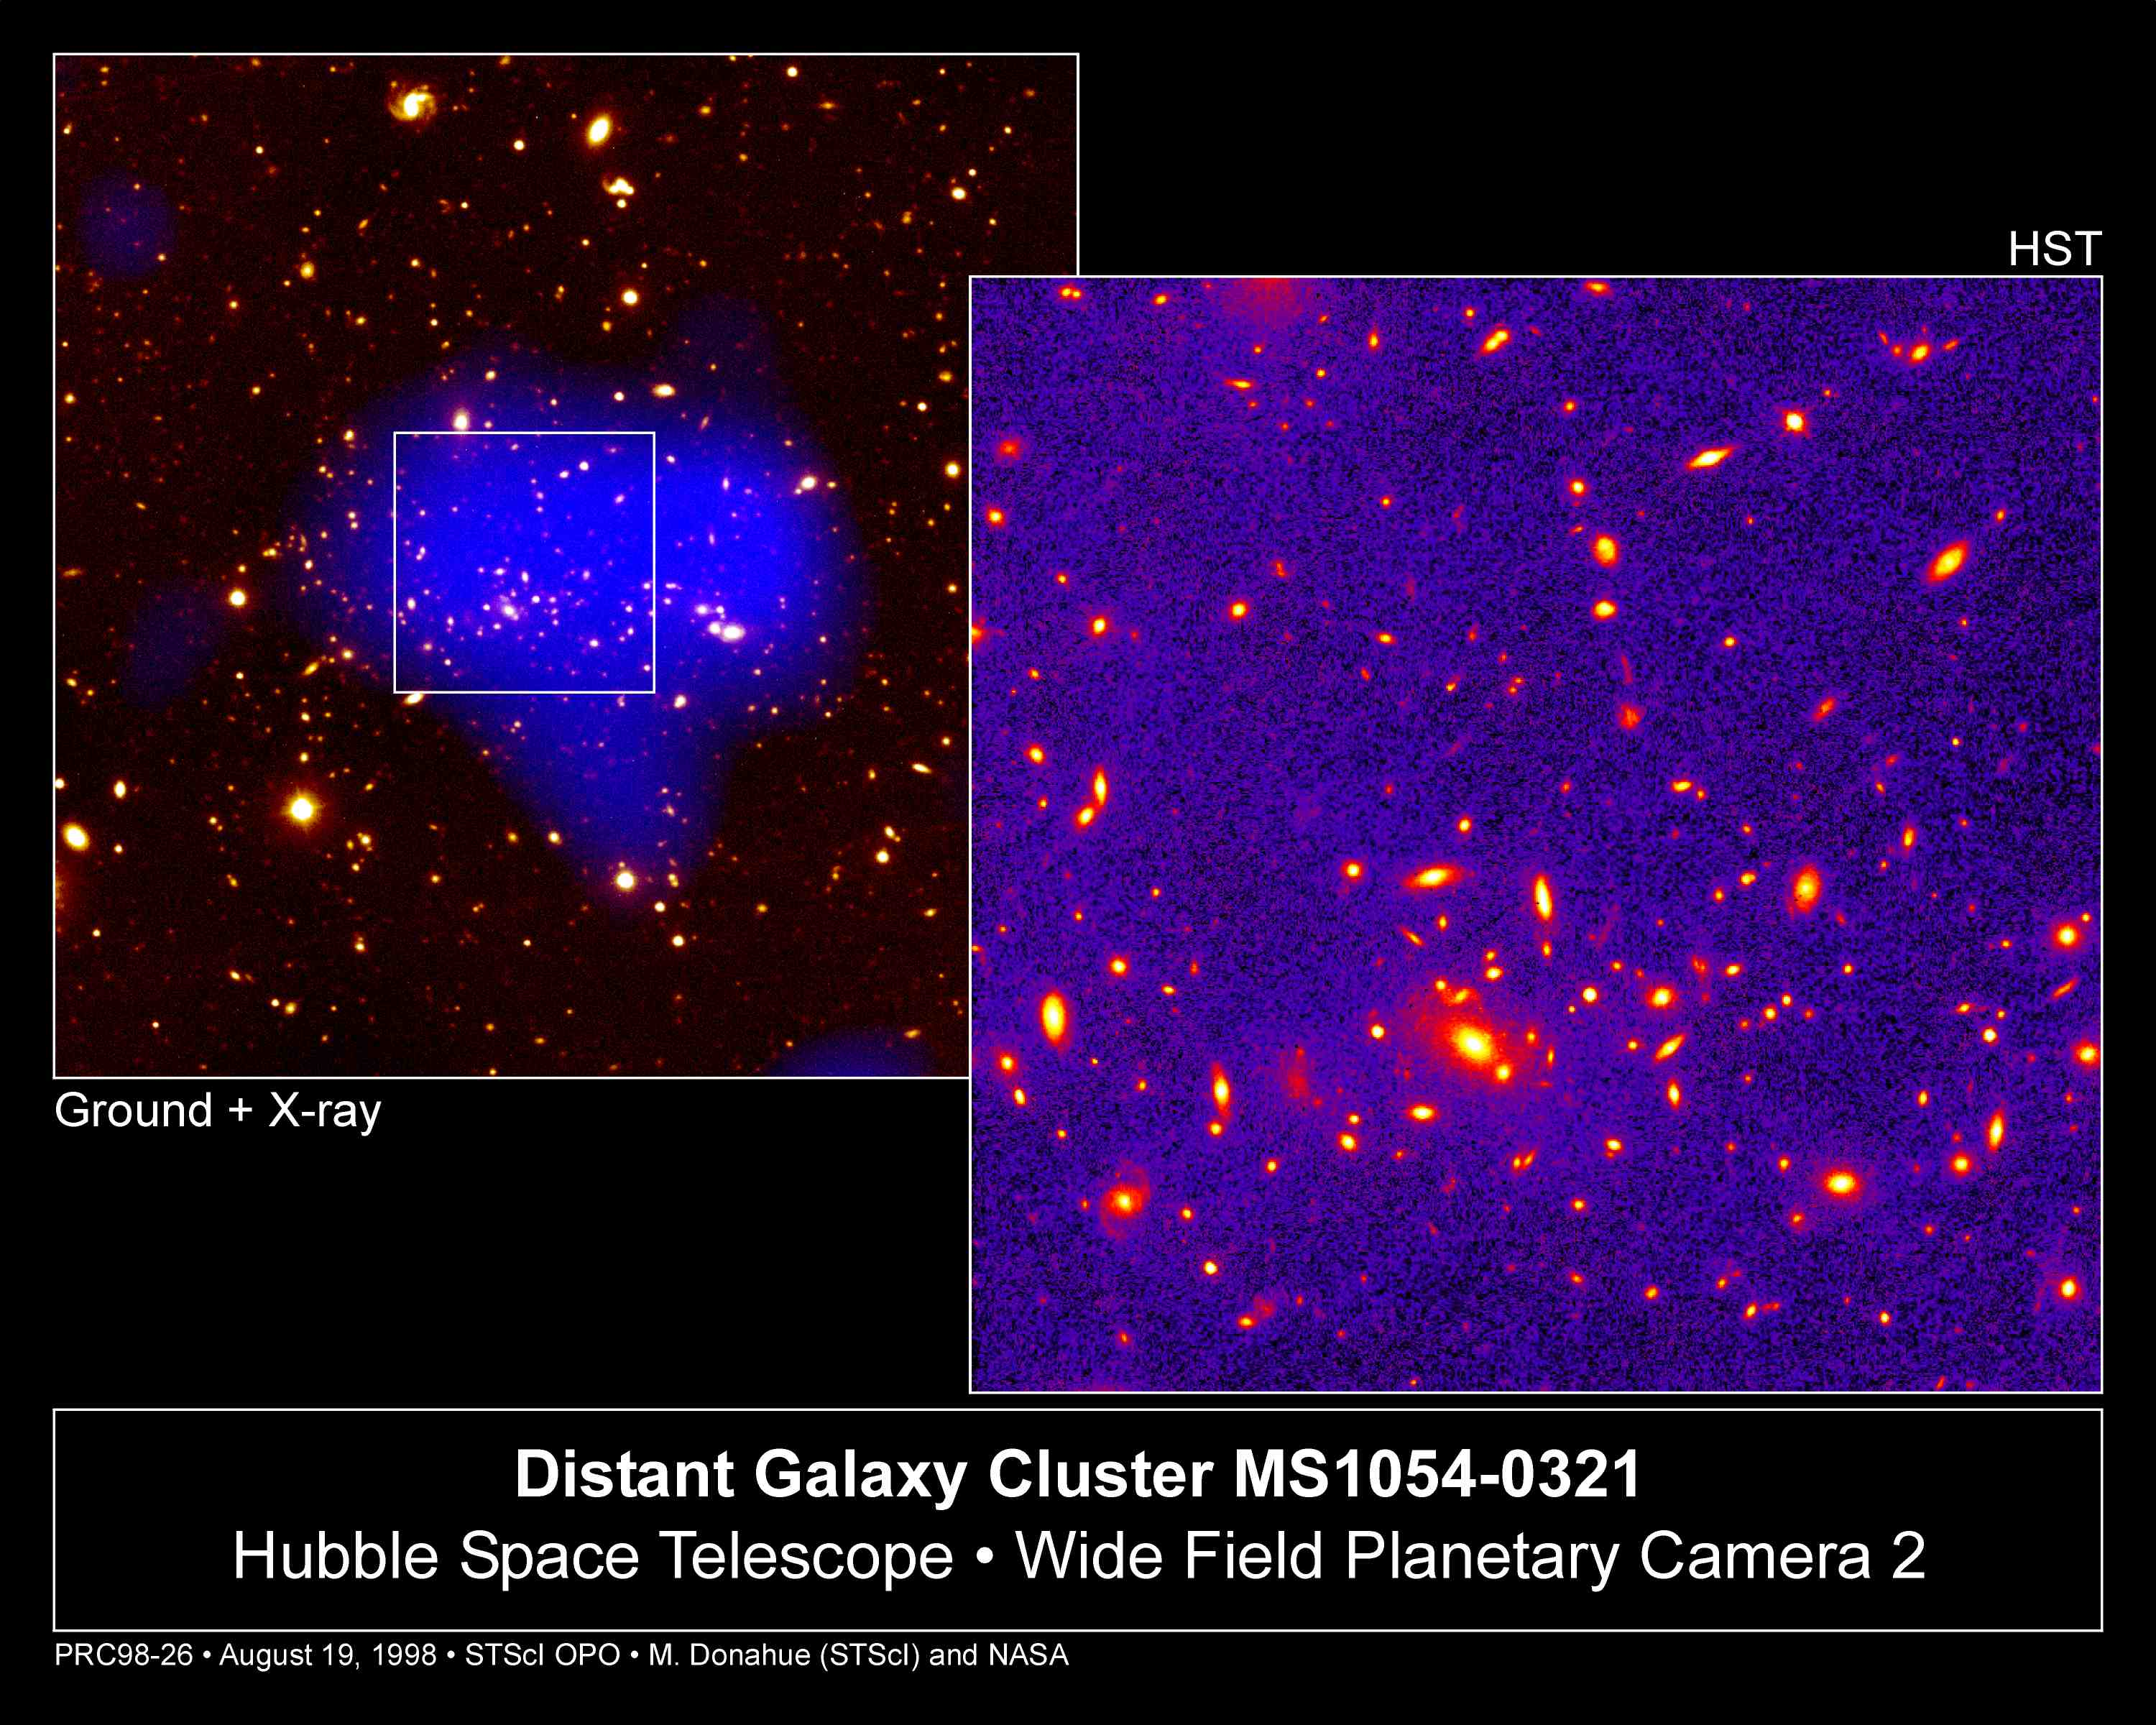

Telescopes Unveil View Of Remote, Massive Galaxy Cluster

These images, taken by three different telescopes, show the distant, hefty galaxy cluster MS1054-0321, containing thousands of galaxies and trillions of stars. Weighing the equivalent of several thousand of our Milky Ways, the cluster is 8 billion light-years from Earth.

Credit: Megan Donahue (STScI), Isabella Gioia (Univ. of Hawaii), and NASA/ESA